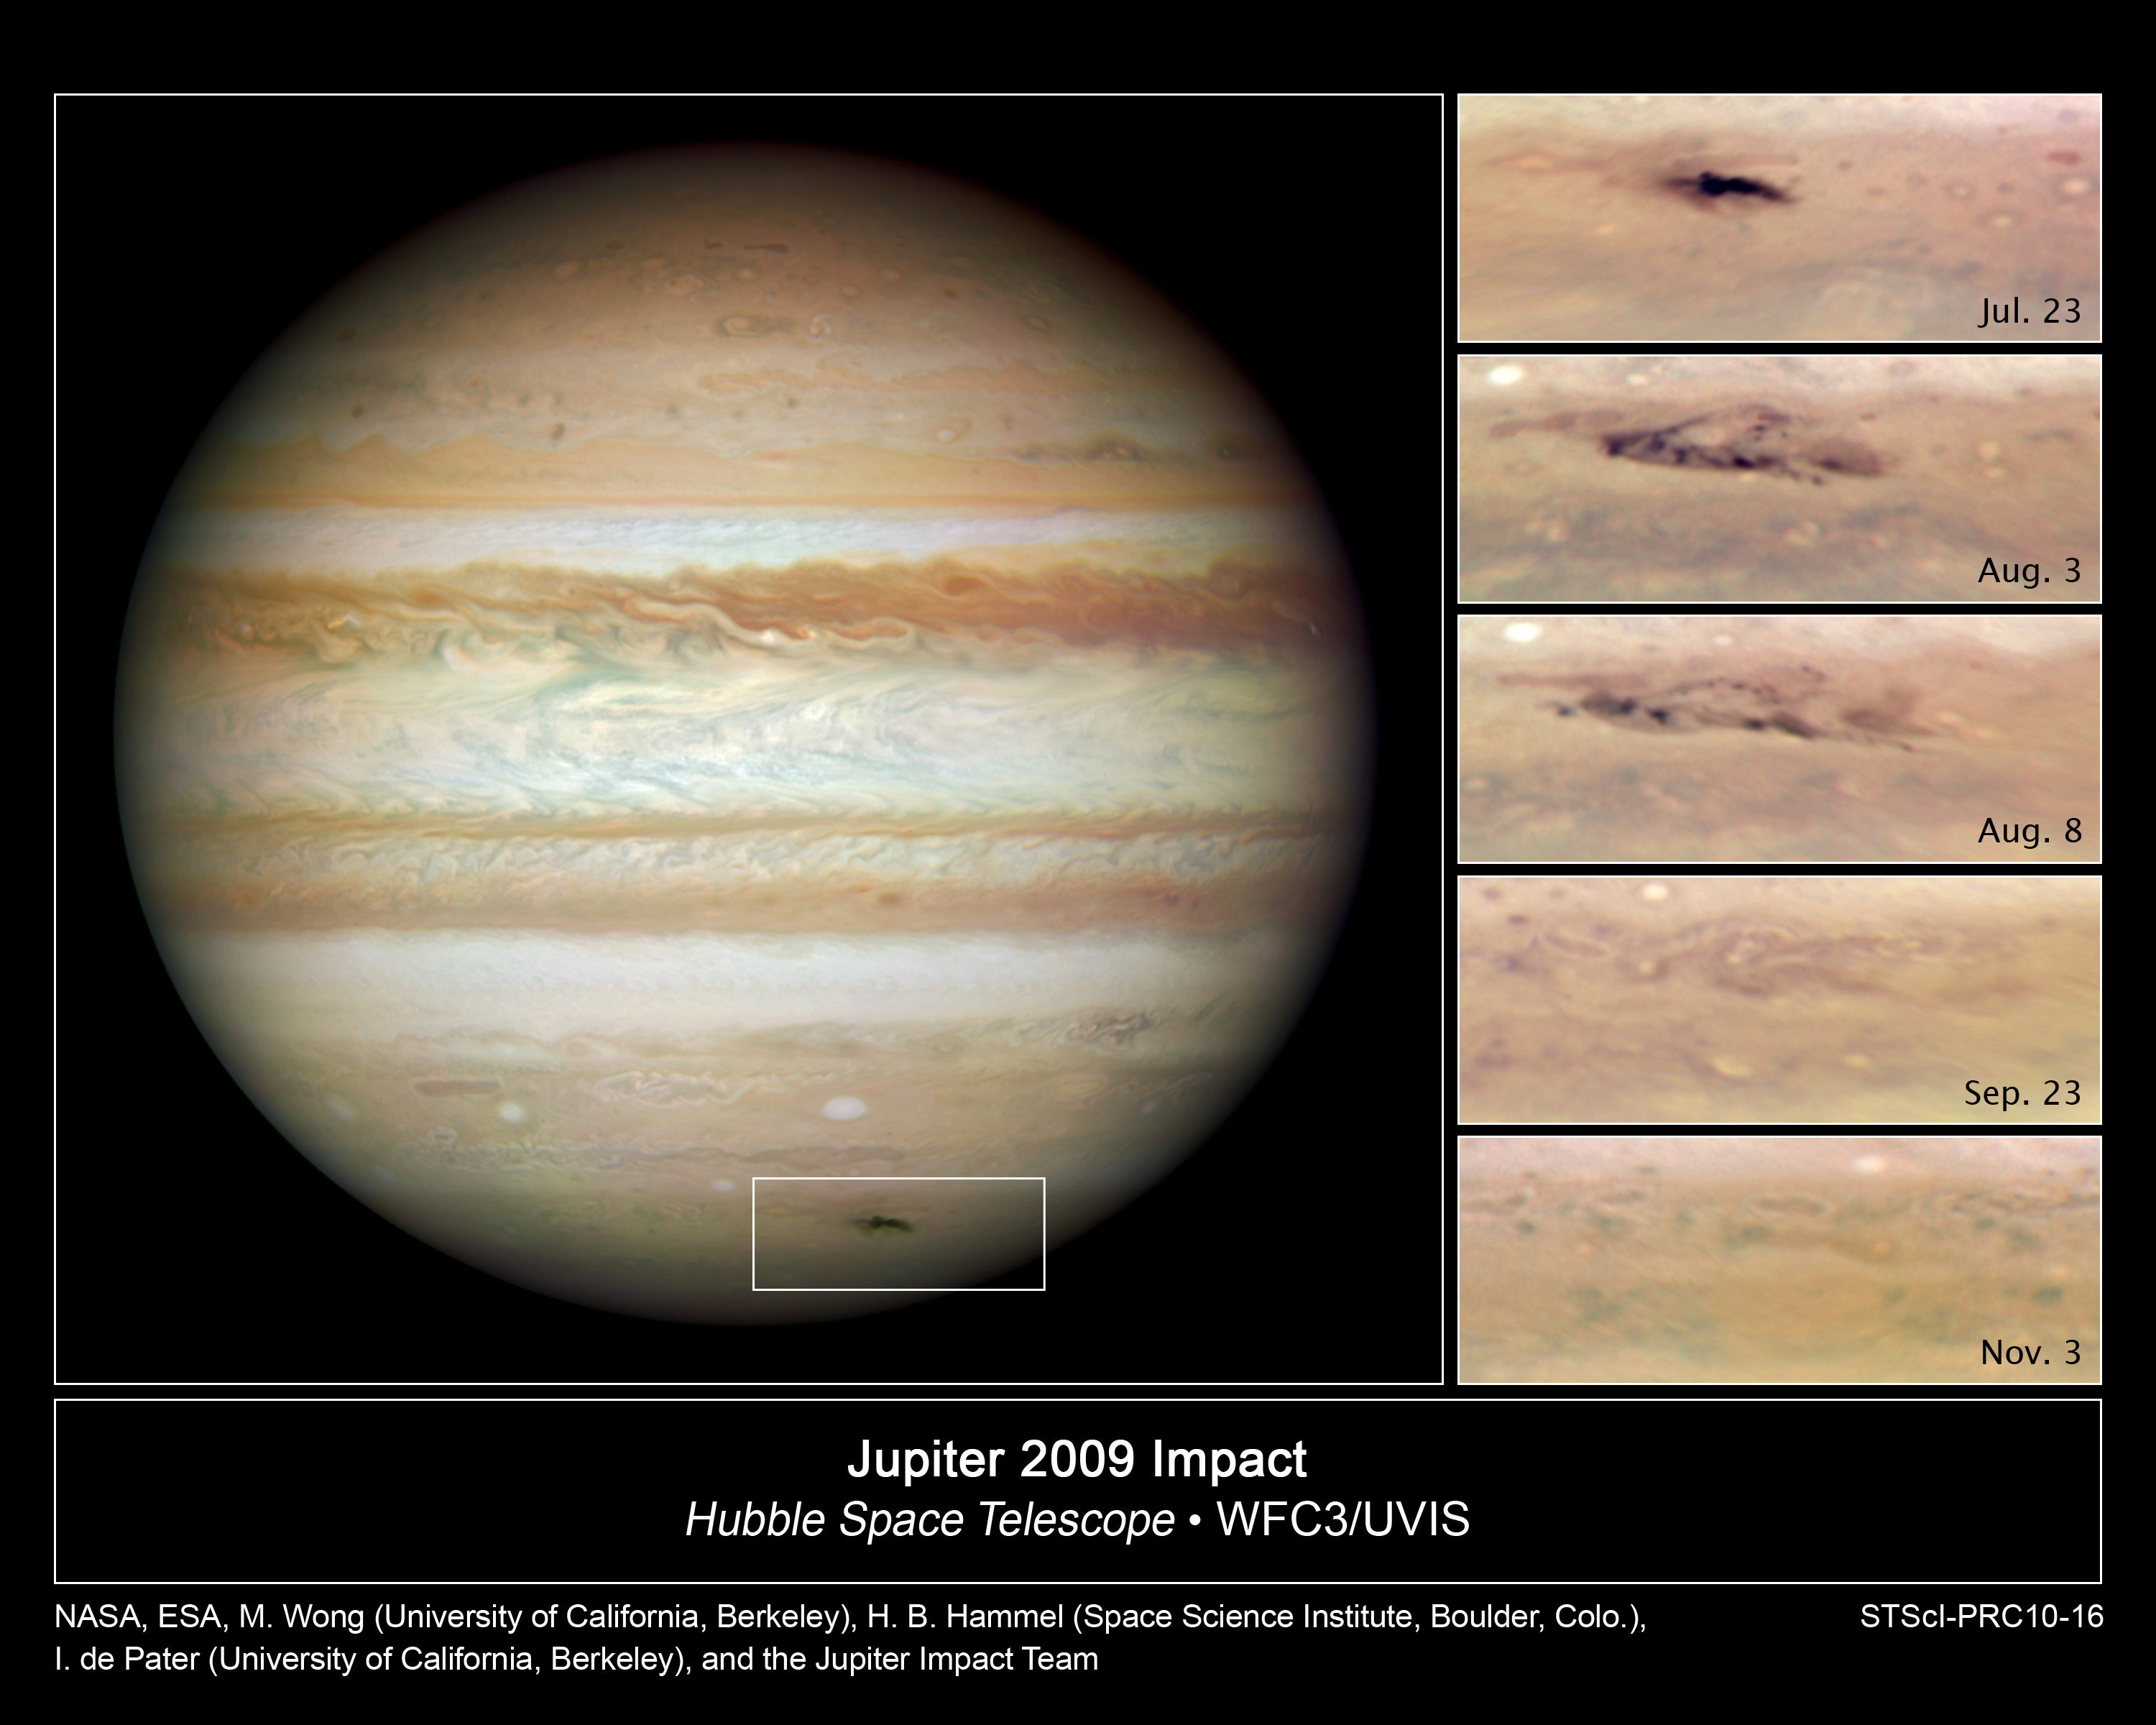

Jupiter impact scar is going, going, gone

These NASA/ESA Hubble Space Telescope snapshots reveal an impact scar on Jupiter fading from view over several months between July 2009 and November 2009.

The Hubble image of Jupiter's full disk was taken on 23 July 2009, revealing an elongated, dark spot at lower, right (inside the rectangular box).

The photograph was taken four days after an amateur astronomer first spotted the scar. The unexpected blemish was created when an unknown object plunged into Jupiter and exploded, scattering debris into the giant planet's cloud tops. The strike was equal to the explosion of a few thousand standard nuclear bombs.

The series of close-up images at right, taken between 23 July 2009 and 3 November 2009, show the impact site rapidly disappearing. Jupiter's winds also are spreading the debris into intricate swirls.

To determine the nature of the culprit that smacked Jupiter, astronomers compared the Hubble images of the 2009 impact site with Hubble photographs of the Comet P/Shoemaker-Levy 9 (SL9) assault on Jupiter in July 1994. In the SL9 collision, more than 20 pieces of a known comet bombarded Jupiter.

Based on that comparison, astronomers say the intruder may have been a rogue asteroid about 500 metres wide. The images of the 2009 impact, therefore, may show for the first time the immediate aftermath of an asteroid striking another planet.

One clue pointing to a possible asteroid strike is the swiftly vanishing impact site, which may be due to a lack of lightweight particles in the debris. An asteroid collision may produce fewer fine particles than a strike by a dusty comet.

The impact site's elongated shape also indicates that the object descended from a shallower angle than the SL9 fragments.

The natural-colour images are composites made from separate exposures in blue, green, and red light.

Credit: NASA & ESA